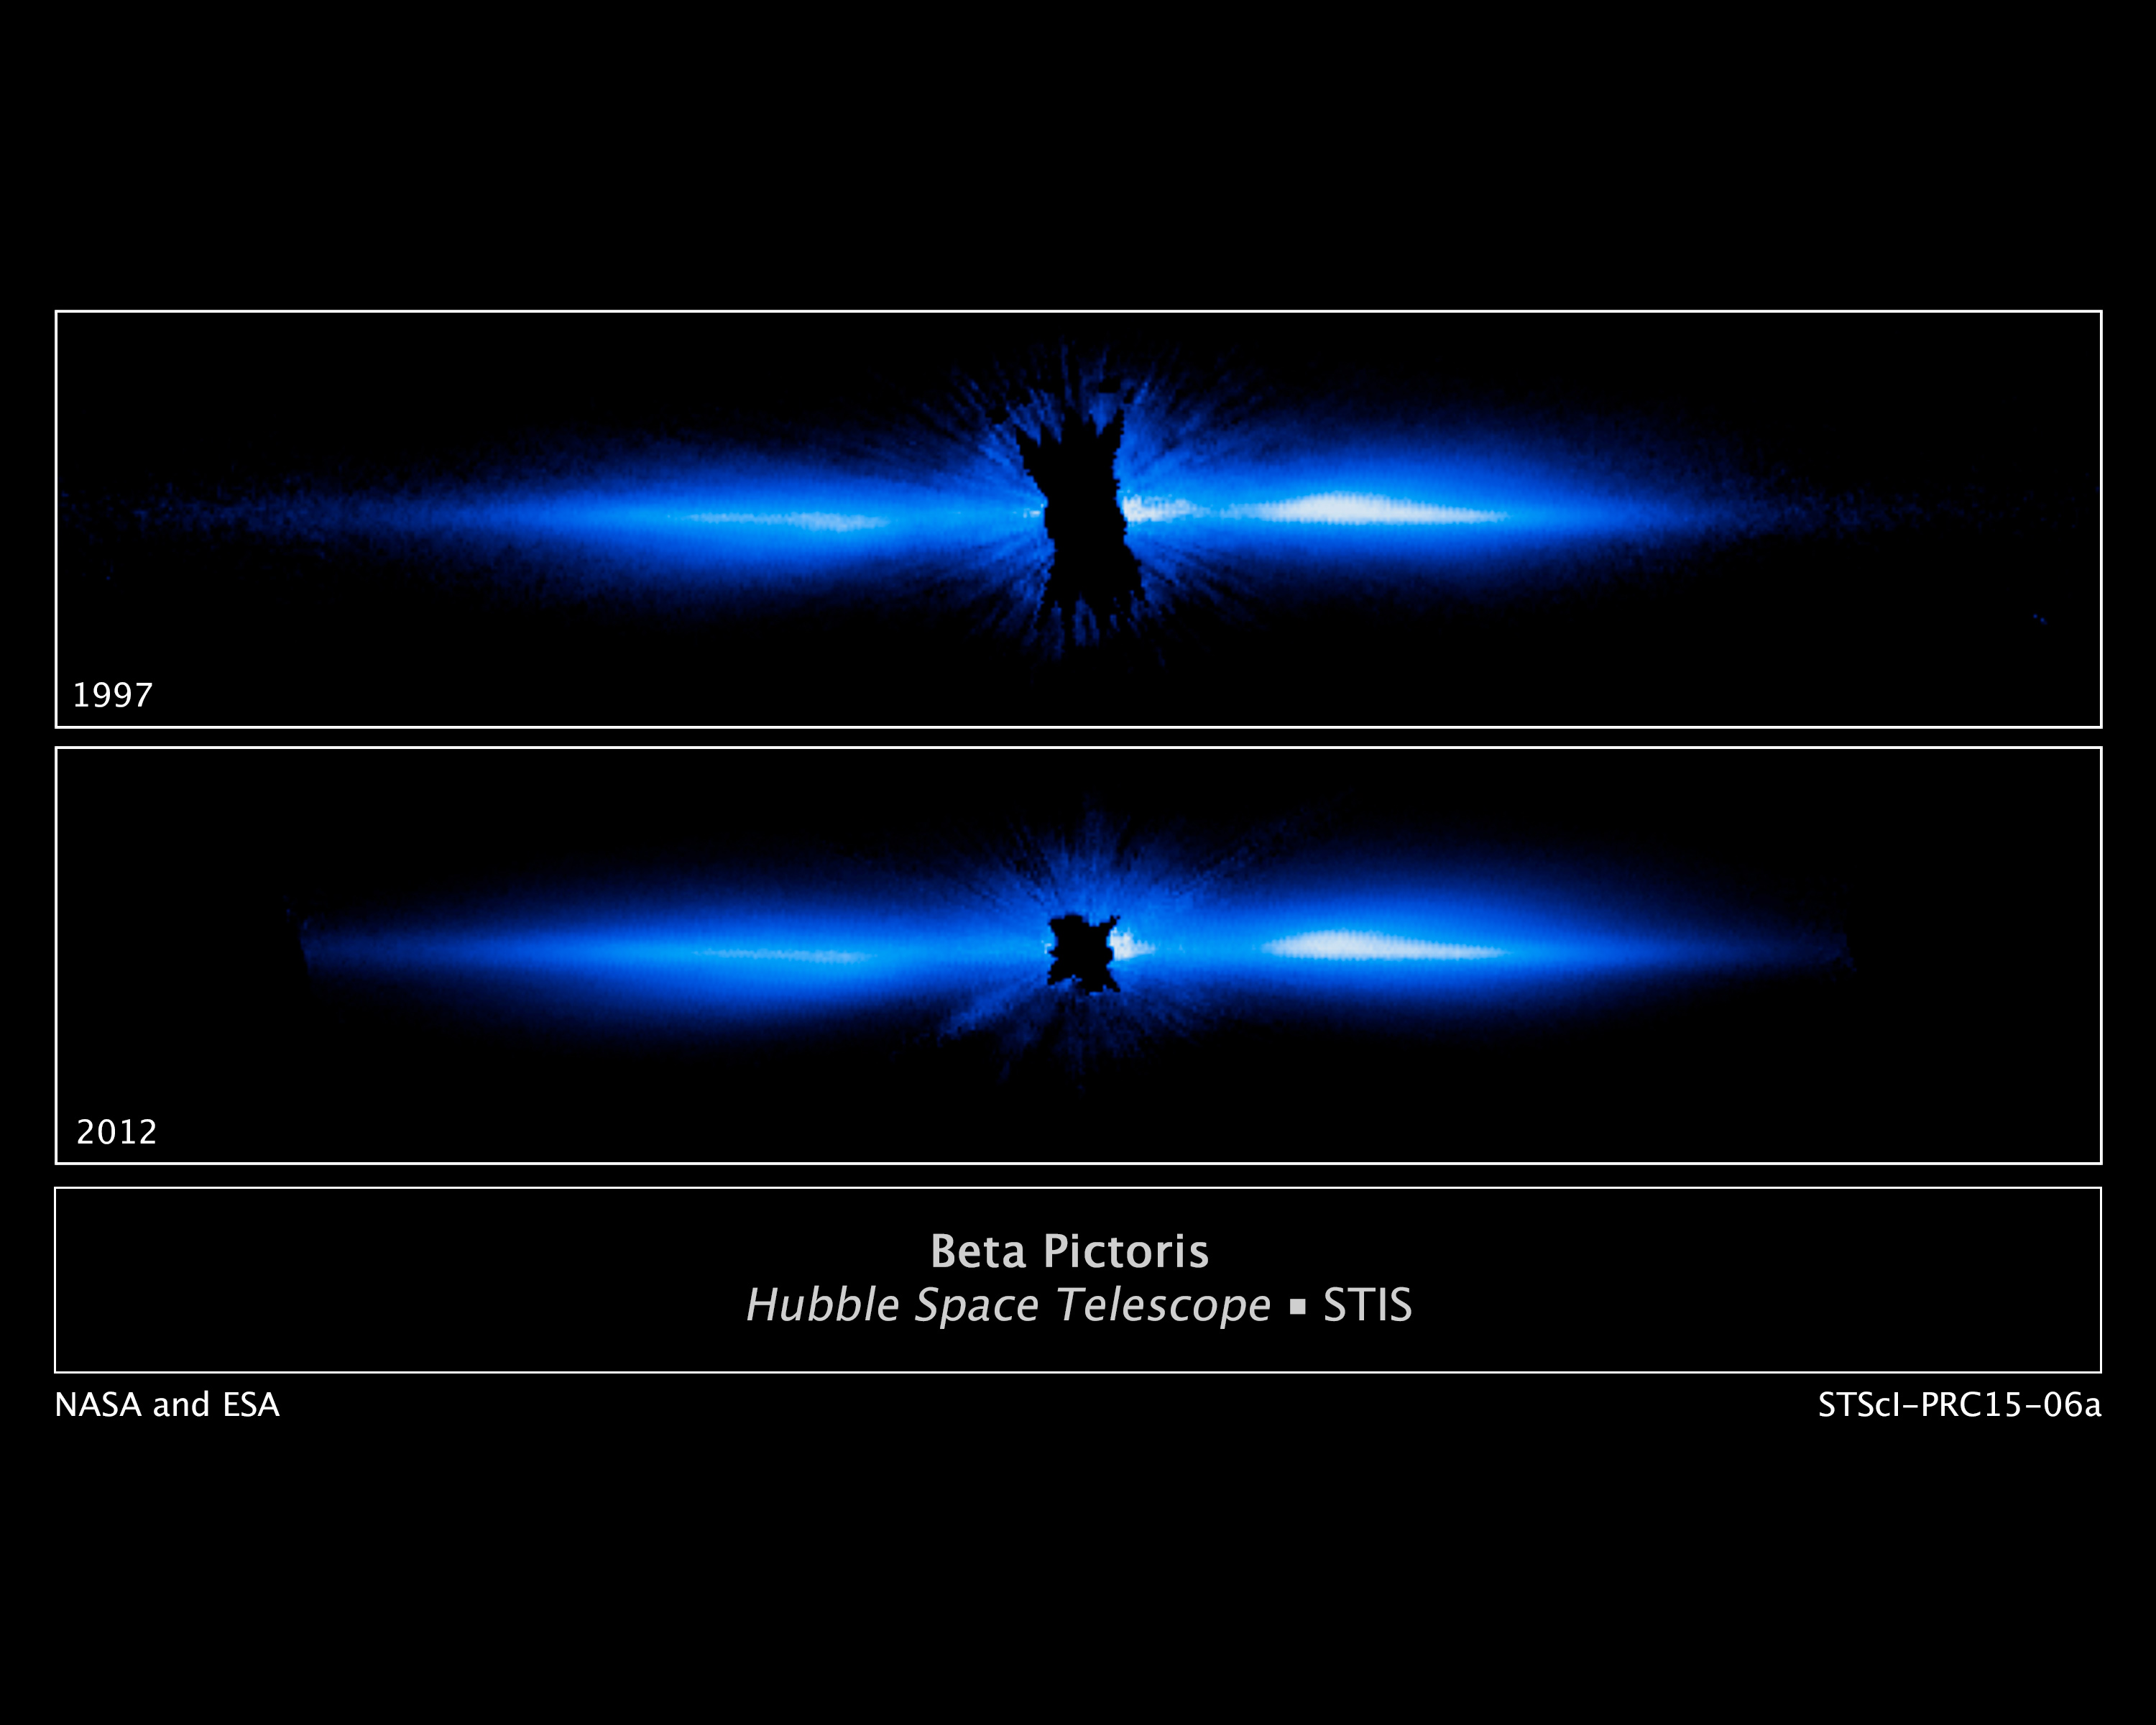

Beta Pictoris — Comparison

This is the most detailed picture to date of a large, edge-on, gas-and-dust disc encircling the 20 million year old star Beta Pictoris. It is compared with a previous image of the disc.

Beta Pictoris remains the only directly imaged debris disc that has a giant planet (discovered in 2009) with an orbital period short enough (estimated to be between 18 and 22 years) that astronomers can see large motion in just a few years. This allows scientists to study how the Beta Pictoris disc is distorted by the presence of a massive planet embedded within the disc.

The new visible-light Hubble image traces the disc to within about one billion kilometres of the star (which is inside the radius of Saturn's orbit about the Sun).

Credit: NASA, ESA, and D. Apai and G. Schneider (University of Arizona)